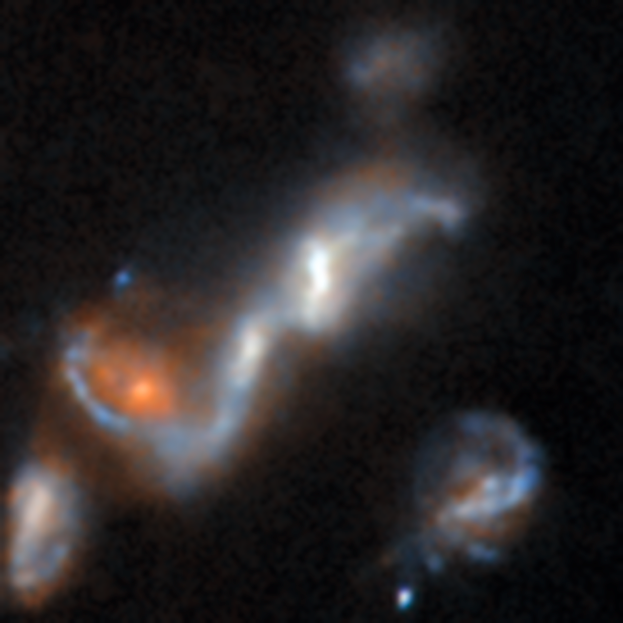

An anomaly from Hubble’s archive — Merging galaxies 2

This is a previously-undiscovered astrophysical anomaly, found in the Hubble Space Telescope’s archive by researchers using a new AI-assisted method. The AI tool allowed them to sift through nearly 100 million image cutouts in just days, turning up rare and anomalous objects like this one.

A small collection of gravitationally interacting galaxies has been found here. Galaxy mergers are relatively common — they were the most abundant type of anomaly found by the researchers — and are easily identified by the distorted shapes of the galaxies’ discs and the tidal tails stretching out between them, caused by the massive gravitational forces slowly pulling each galaxy apart. Eventually the galaxies we see here will be totally disrupted and finally settle into the shape of a single galaxy, most likely an elliptical galaxy.

Read more about this new research here.

Credit: ESA/Hubble & NASA, D. O’Ryan, P. Gómez (European Space Agency), M. Zamani (ESA/Hubble)